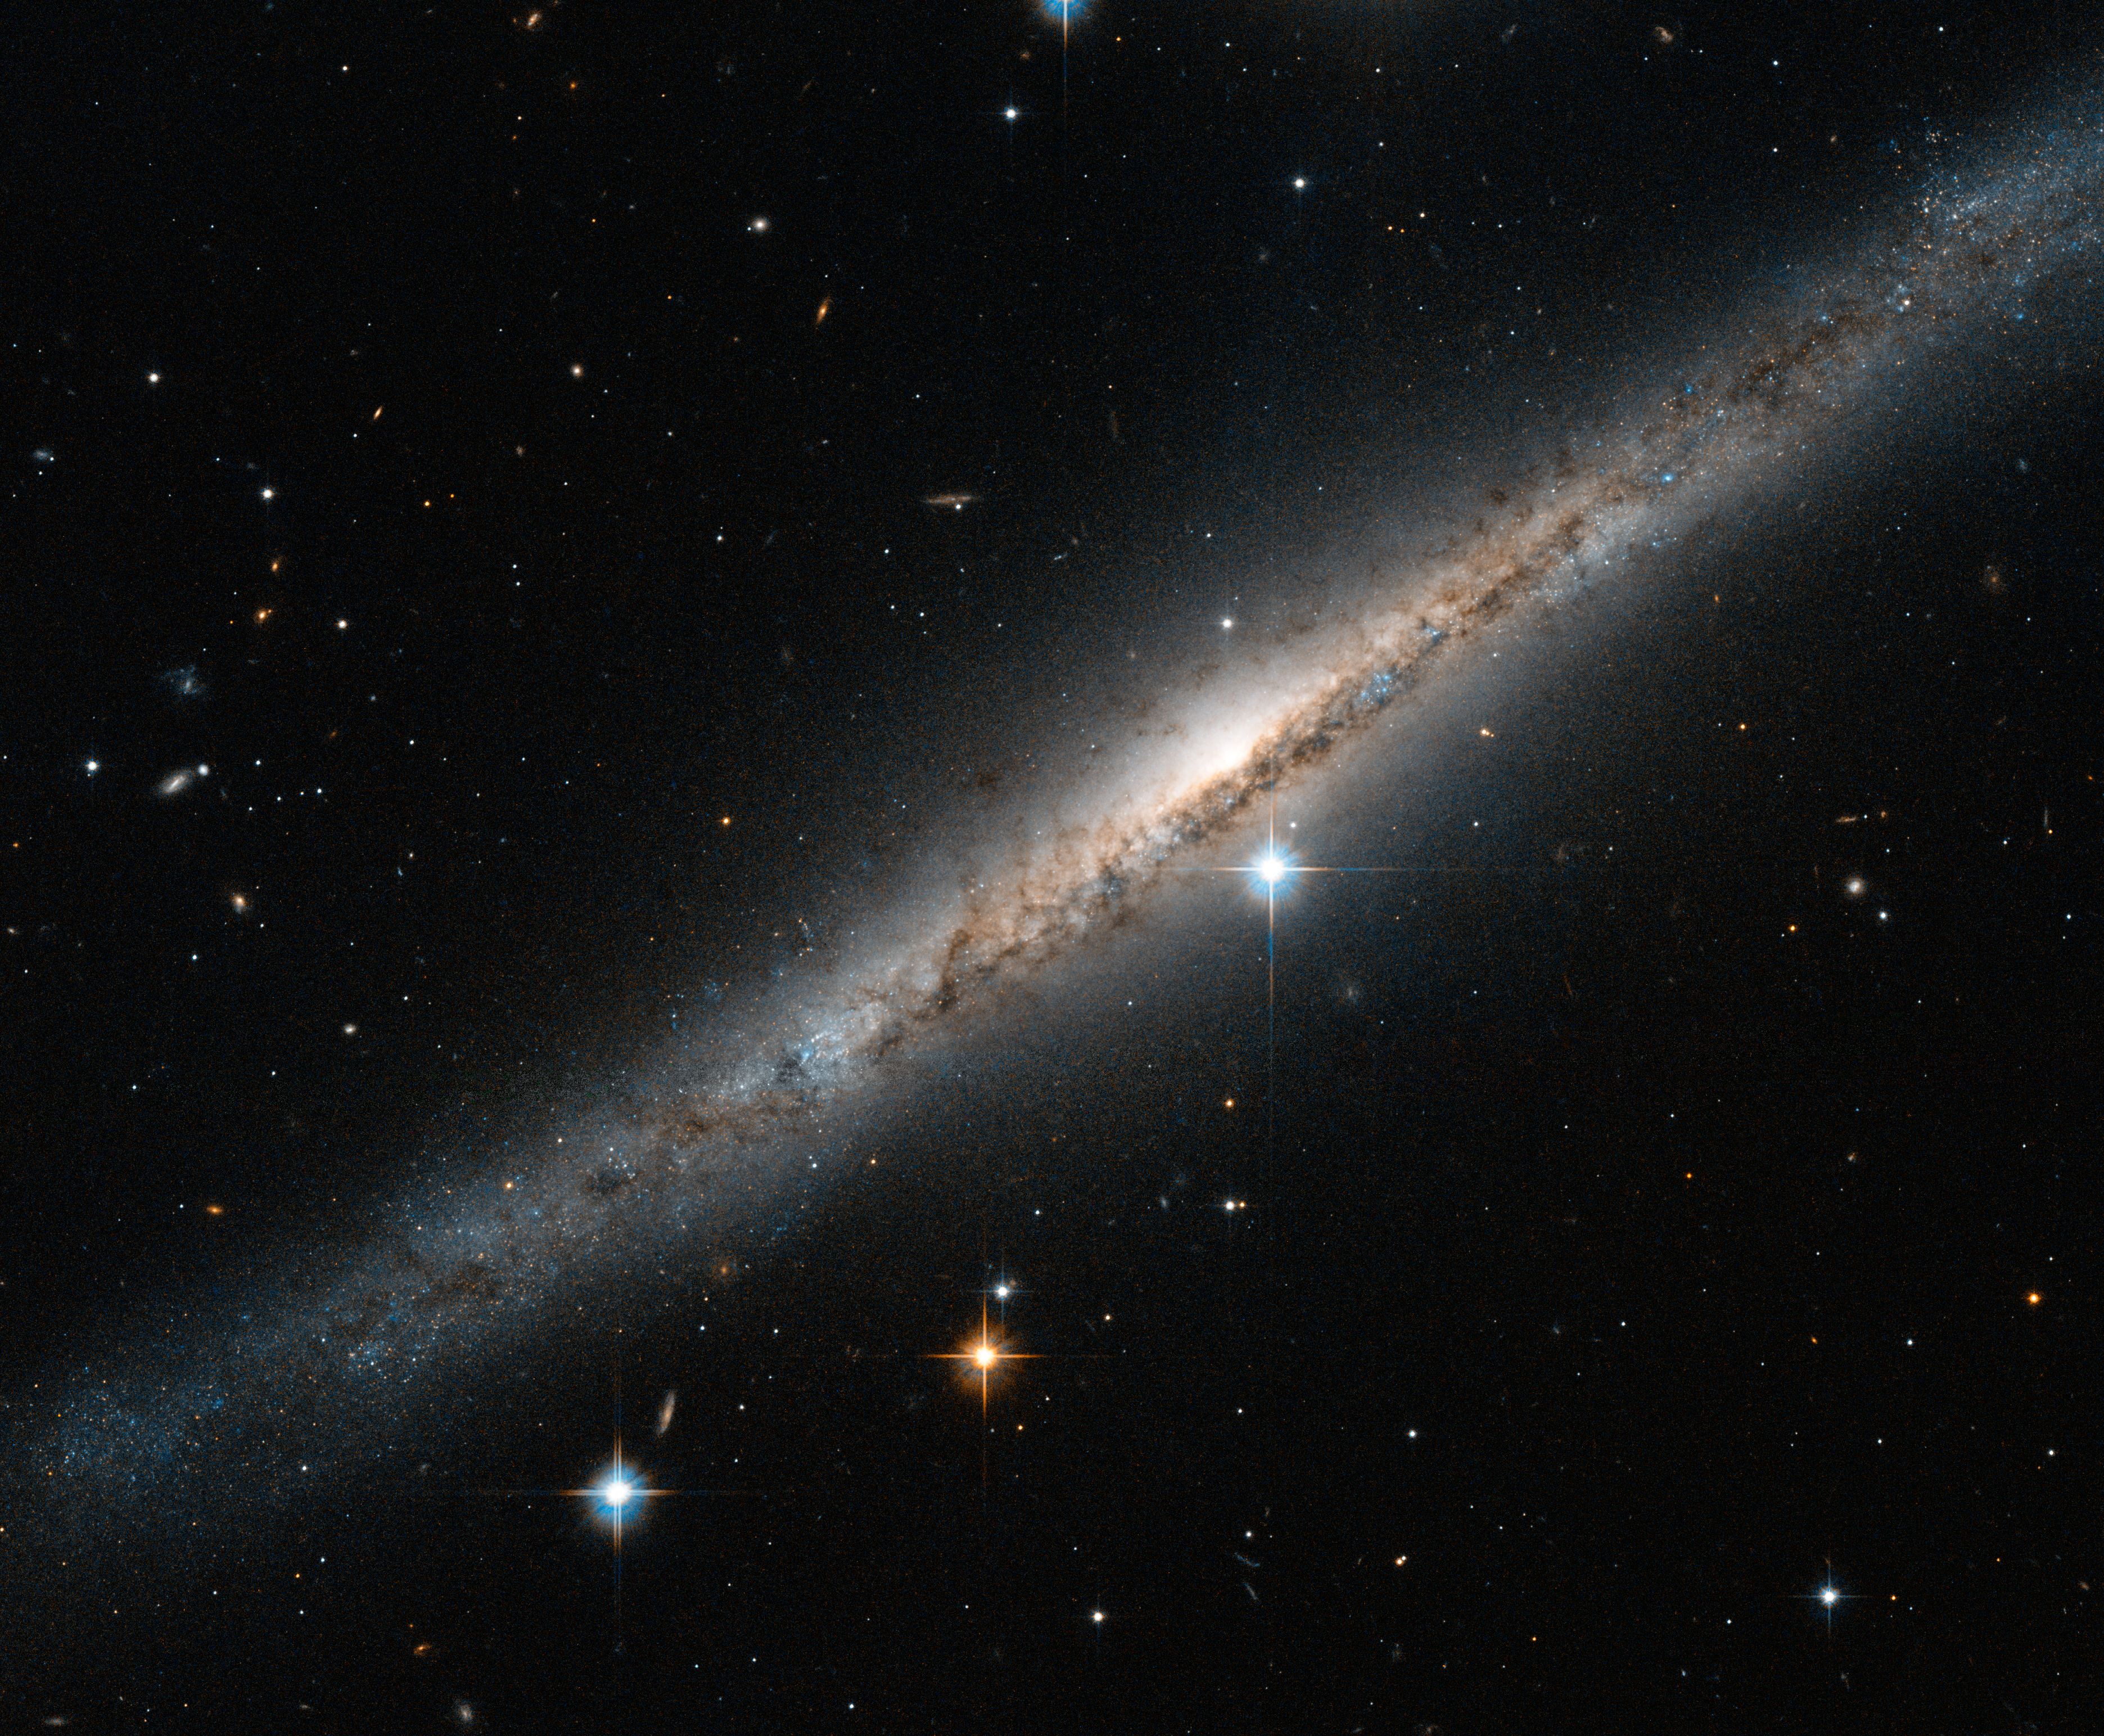

A side-on spiral streak

This thin, glittering streak of stars is the spiral galaxy ESO 121-6, which lies in the southern constellation of Pictor (The Painter's Easel). Viewed almost exactly side-on, the intricate structure of the swirling arms is hidden, but the full length of the galaxy can be seen — including the intense glow from the central bulge, a dense region of tightly packed young stars sitting at the centre of the spiral arms.

Tendrils of dark dust can be seen across the frame, partially obscuring the bright centre of the galaxy and continuing out towards the smattering of stars at its edges, where the dust lanes and shapes melt into the inky background. Numerous nearby stars and galaxies are visible as small smudges in the surrounding sky, and the brightest stars are dazzlingly prominent towards the bottom left of the image.

ESO 121-6 is a galaxy with patchy, loosely wound arms and a relatively faint central bulge. It actually belongs to a group of galaxies, a clump of no more than 50 similar structures all loosely bound to one another by gravity. The Milky Way is also a member of a galactic group, known as the Local Group.

Credit: ESA/Hubble & NASA